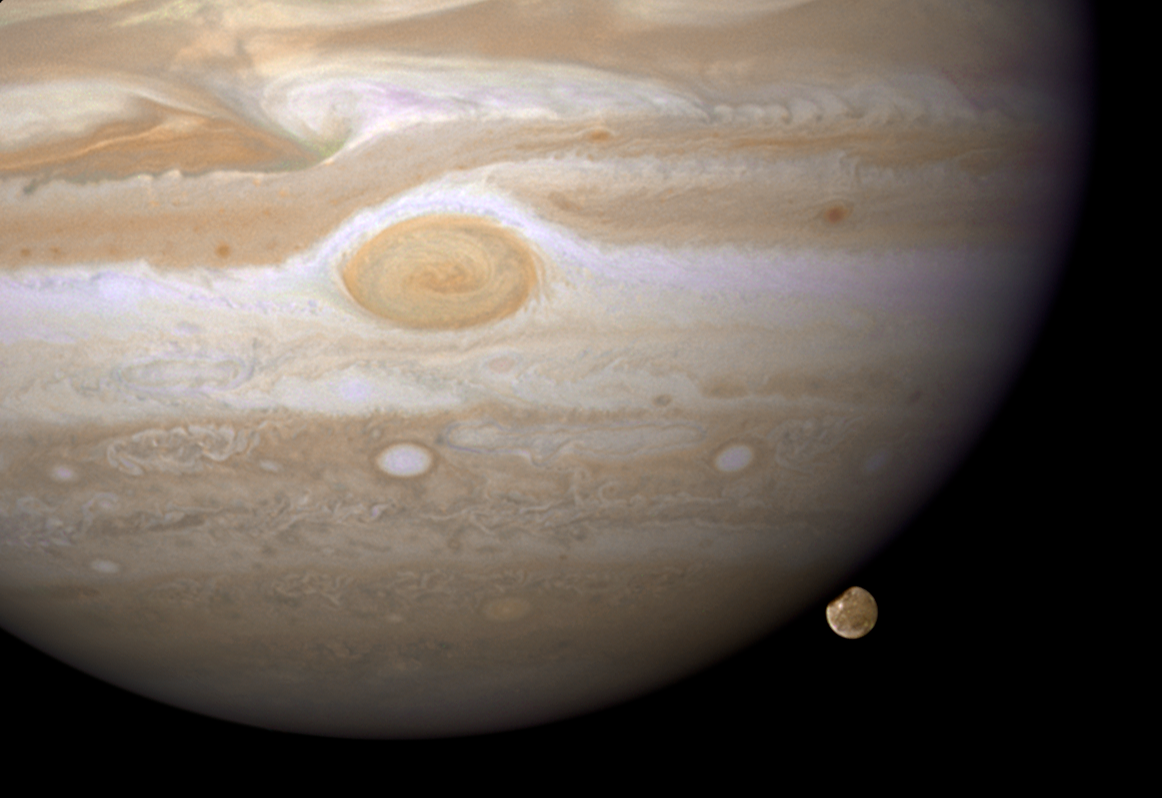

Jupiter and Ganymede

The NASA/ESA Hubble Space Telescope has caught Jupiter's moon Ganymede playing a game of "peek-a-boo." In this crisp Hubble image, Ganymede is shown just before it ducks behind the giant planet.

Ganymede completes an orbit around Jupiter every seven days. Because Ganymede's orbit is tilted nearly edge-on to Earth, it routinely can be seen passing in front of and disappearing behind its giant host, only to reemerge later.

Composed of rock and ice, Ganymede is the largest moon in our Solar System. It is even larger than the planet Mercury. But Ganymede looks like a dirty snowball next to Jupiter, the largest planet in our Solar System. Jupiter is so big that only part of its Southern Hemisphere can be seen in this image.

Hubble's view is so sharp that astronomers can see features on Ganymede's surface, most notably the white impact crater, Tros, and its system of rays, bright streaks of material blasted from the crater.

The image also shows Jupiter's Great Red Spot, the large eye-shaped feature at upper left. A storm the size of two Earths, the Great Red Spot has been raging for more than 300 years. Hubble's sharp view of the gas giant planet also reveals the texture of the clouds in the Jovian atmosphere as well as various other storms and vortices.

Astronomers use these images to study Jupiter's upper atmosphere. As Ganymede passes behind the giant planet, it reflects sunlight, which then passes through Jupiter's atmosphere. Imprinted on that light is information about the gas giant's atmosphere, which yields clues about the properties of Jupiter's high-altitude haze above the cloud tops.

This colour image was made from three images taken on April 9, 2007, with the Wide Field Planetary Camera 2 in red, green, and blue filters. The image shows Jupiter and Ganymede in close to natural colours.

Credit: NASA, ESA and E. Karkoschka (University of Arizona)